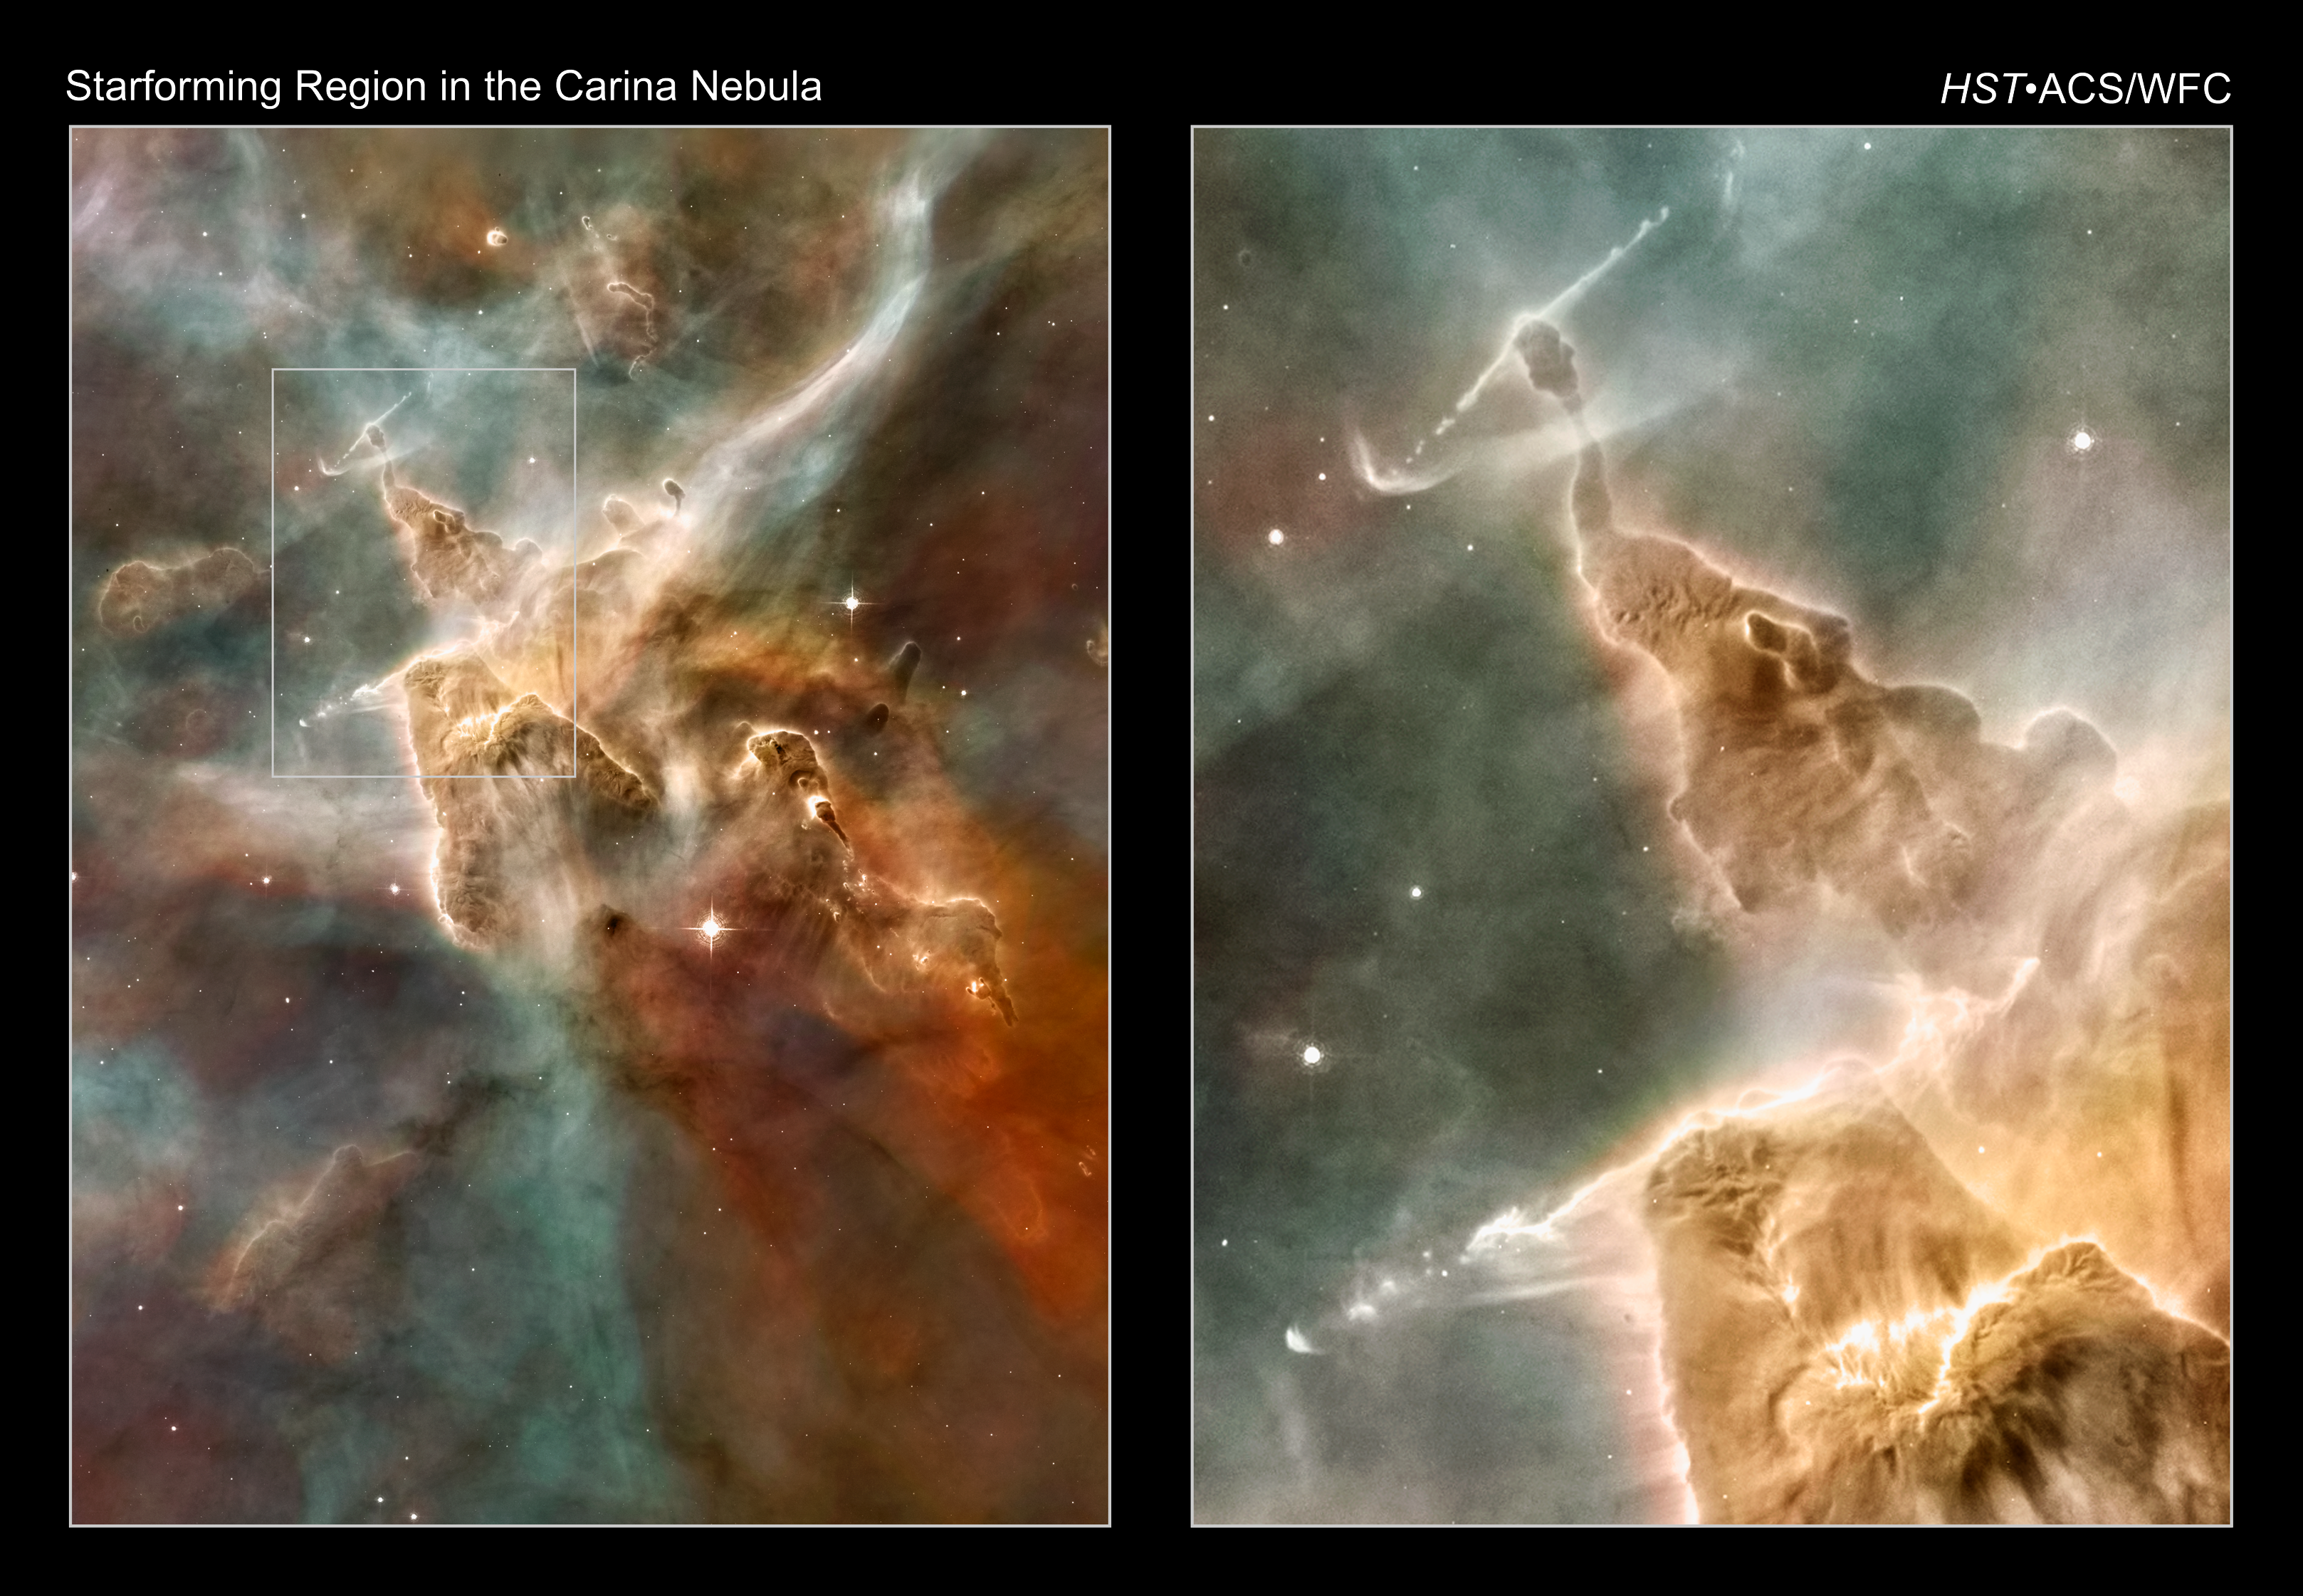

Star-forming regions in the Carina Nebula

[Left] -- A towering "mountain" of cold hydrogen gas laced with dust is the site of new star formation in the Carina Nebula. The great gas pillar is being eroded by the ultraviolet radiation from the hottest newborn stars in the nebula.

[Right] -- A close-up look at the peak of one of these "pillars of creation" reveals unequivocal evidence that stars are being born inside the columns. A pencil-like streamer of gas shoots out in both directions from the pillar and ploughs into surrounding gas like a fire hose hitting a wall of sand. The jet is being launched from a newly forming star hidden inside the column. A similar jet appears near the bottom of the image. These stellar jets are a common signature of the birth of a new star.

This image is from a mosaic of the Carina Nebula assembled from 48 frames taken with the Hubble Space Telescope's Advanced Camera for Surveys. The Hubble images were taken in the light of ionized hydrogen. Colour information was added with data taken at the Cerro Tololo Inter-American Observatory in Chile. Red corresponds to sulphur, green to hydrogen, and blue to oxygen emission.

Credit: NASA, ESA, N. Smith (University of California, Berkeley), and The Hubble Heritage Team (STScI/AURA)